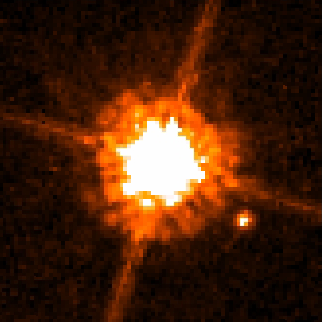

Hubble spies possible brown dwarf around low-mass star

This NASA/ESA Hubble Space Telescope image shows one of the smallest objects ever seen around a normal star. Astronomers believe the object is a brown dwarf because it is 12 times more massive than Jupiter. The brown dwarf candidate, called CHXR 73 B, is the bright spot at lower right. It orbits a red dwarf star, dubbed CHXR 73, which is a third less massive than the Sun. At 2 million years old, the star is very young when compared with our middle-aged 4.6-billion-year-old Sun.

CHXR 73 B orbits 19.5 billion miles (about 31 billion kilometres) from its star, or roughly 200 times farther than Earth is from the Sun.

The star looks significantly larger than CHXR 73 B because it is much brighter than its companion. CHXR 73 B is 1/100 as bright as its star. The cross-shaped diffraction spikes around the star are artifacts produced within the telescope's optics. The star is 500 light-years away from Earth.

Hubble's Advanced Camera for Surveys snapped the image in near-infrared light on Feb. 10 and 15, 2005. The colour used in the image does not reflect the object's true colour.

Credit: NASA, ESA, and K. Luhman (Penn State University, USA)